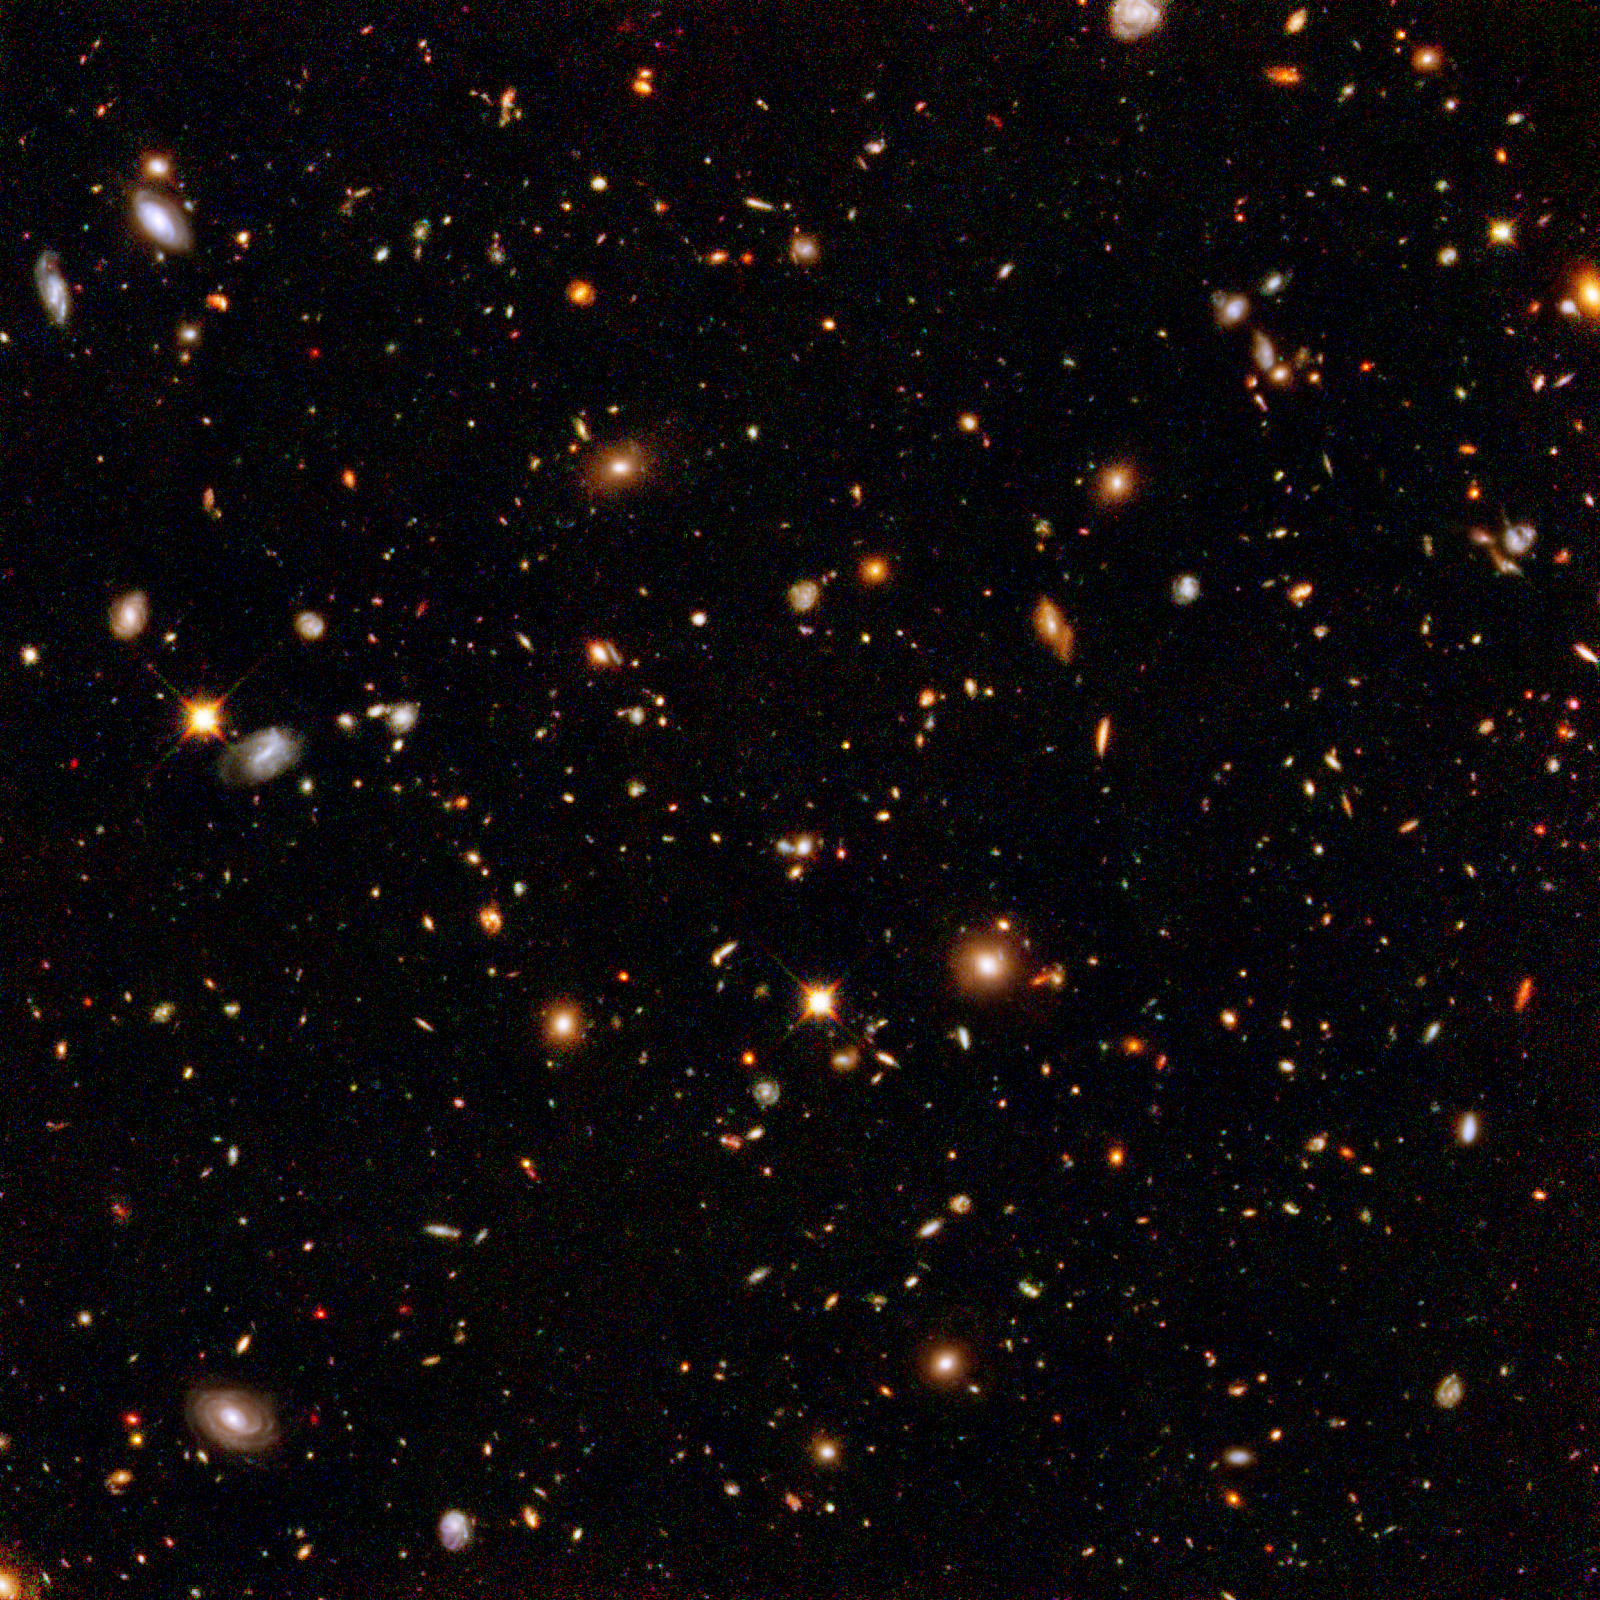

Hubble's near-infrared camera digs for galactic gold

This infrared view reveals galaxies far, far away that existed long, long ago. Taken by the Near Infrared Camera and Multi-Object Spectrometer aboard the NASA/ESA Hubble Space Telescope, the image is part of the Hubble Ultra Deep Field survey, the deepest portrait ever taken of the universe. This galaxy-studded view represents a "deep" core sample of the universe, cutting across billions of light-years.

This infrared image offers a slightly farther look into the universe's past, compared with the snapshot of the same field taken in visible light by Hubble's Advanced Camera for Surveys. Astronomers used Hubble's near-infrared camera to find very distant galaxies that cannot be seen in visible light. The light from remote galaxies has been stretched from visible to invisible infrared wavelengths by the expansion of space. Some light also has been absorbed by intergalactic hydrogen.

Astronomers are hoping to strike it rich by finding some of the farthest known galaxies, existing perhaps 400 million years after the big bang. To find them, astronomers must combine the infrared and visible-light images. The remotest galaxies will only appear in the infrared image. If discovered, these record-breaking galaxies may offer clues to the emergence of galaxies when the universe was only 2 to 5 percent of its present age.

The Ultra Deep Field observations represent a narrow, deep view of the cosmos. Peering into the Ultra Deep Field is like looking through a 2.5 metre-long soda straw.

In ground-based photographs, the patch of sky in which the galaxies reside (just one-tenth the diameter of the full Moon) is largely empty. Located in the constellation Fornax, the region is so empty that only a handful of stars within the Milky Way galaxy can be seen in the image.

This composite image was assembled from exposures taken by the near-infrared camera and the advanced camera. Astronomers incorporated the advanced camera's visible-light observations into the image to better discriminate the colours of the distant galaxies. The near-infrared camera observations were taken from 3 September to 27 November 2003.

Credit: NASA, ESA and R. Thompson (Univ. Arizona)